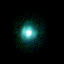

SMP 27 in the Large Magellanic Cloud

In the pictures of the planetary nebulae, colour corresponds to temperature. Blue represents hotter regions of the nebulae and red, cooler. Scientists are probing these illuminated stellar relics in our neighboring galaxy because they are at relatively the same distance - about 168, 000 light-years -- from Earth. Knowing the distance to these objects allows scientists to compare their shapes and sizes, and precisely determine the brightness of their central stars. For this reason, even though these glowing remains of dying stars are about 50 times farther away than the stunning planetary nebulae photographed in the Milky Way, they are of invaluable importance.

Credit: NASA/ESA; L. Stanghellini, R. Shaw, C. Blades, and M. Mutchler, Space Telescope Science Institute, Baltimore, Md.; and B. Balick, University of Washington, Seattle, Wash